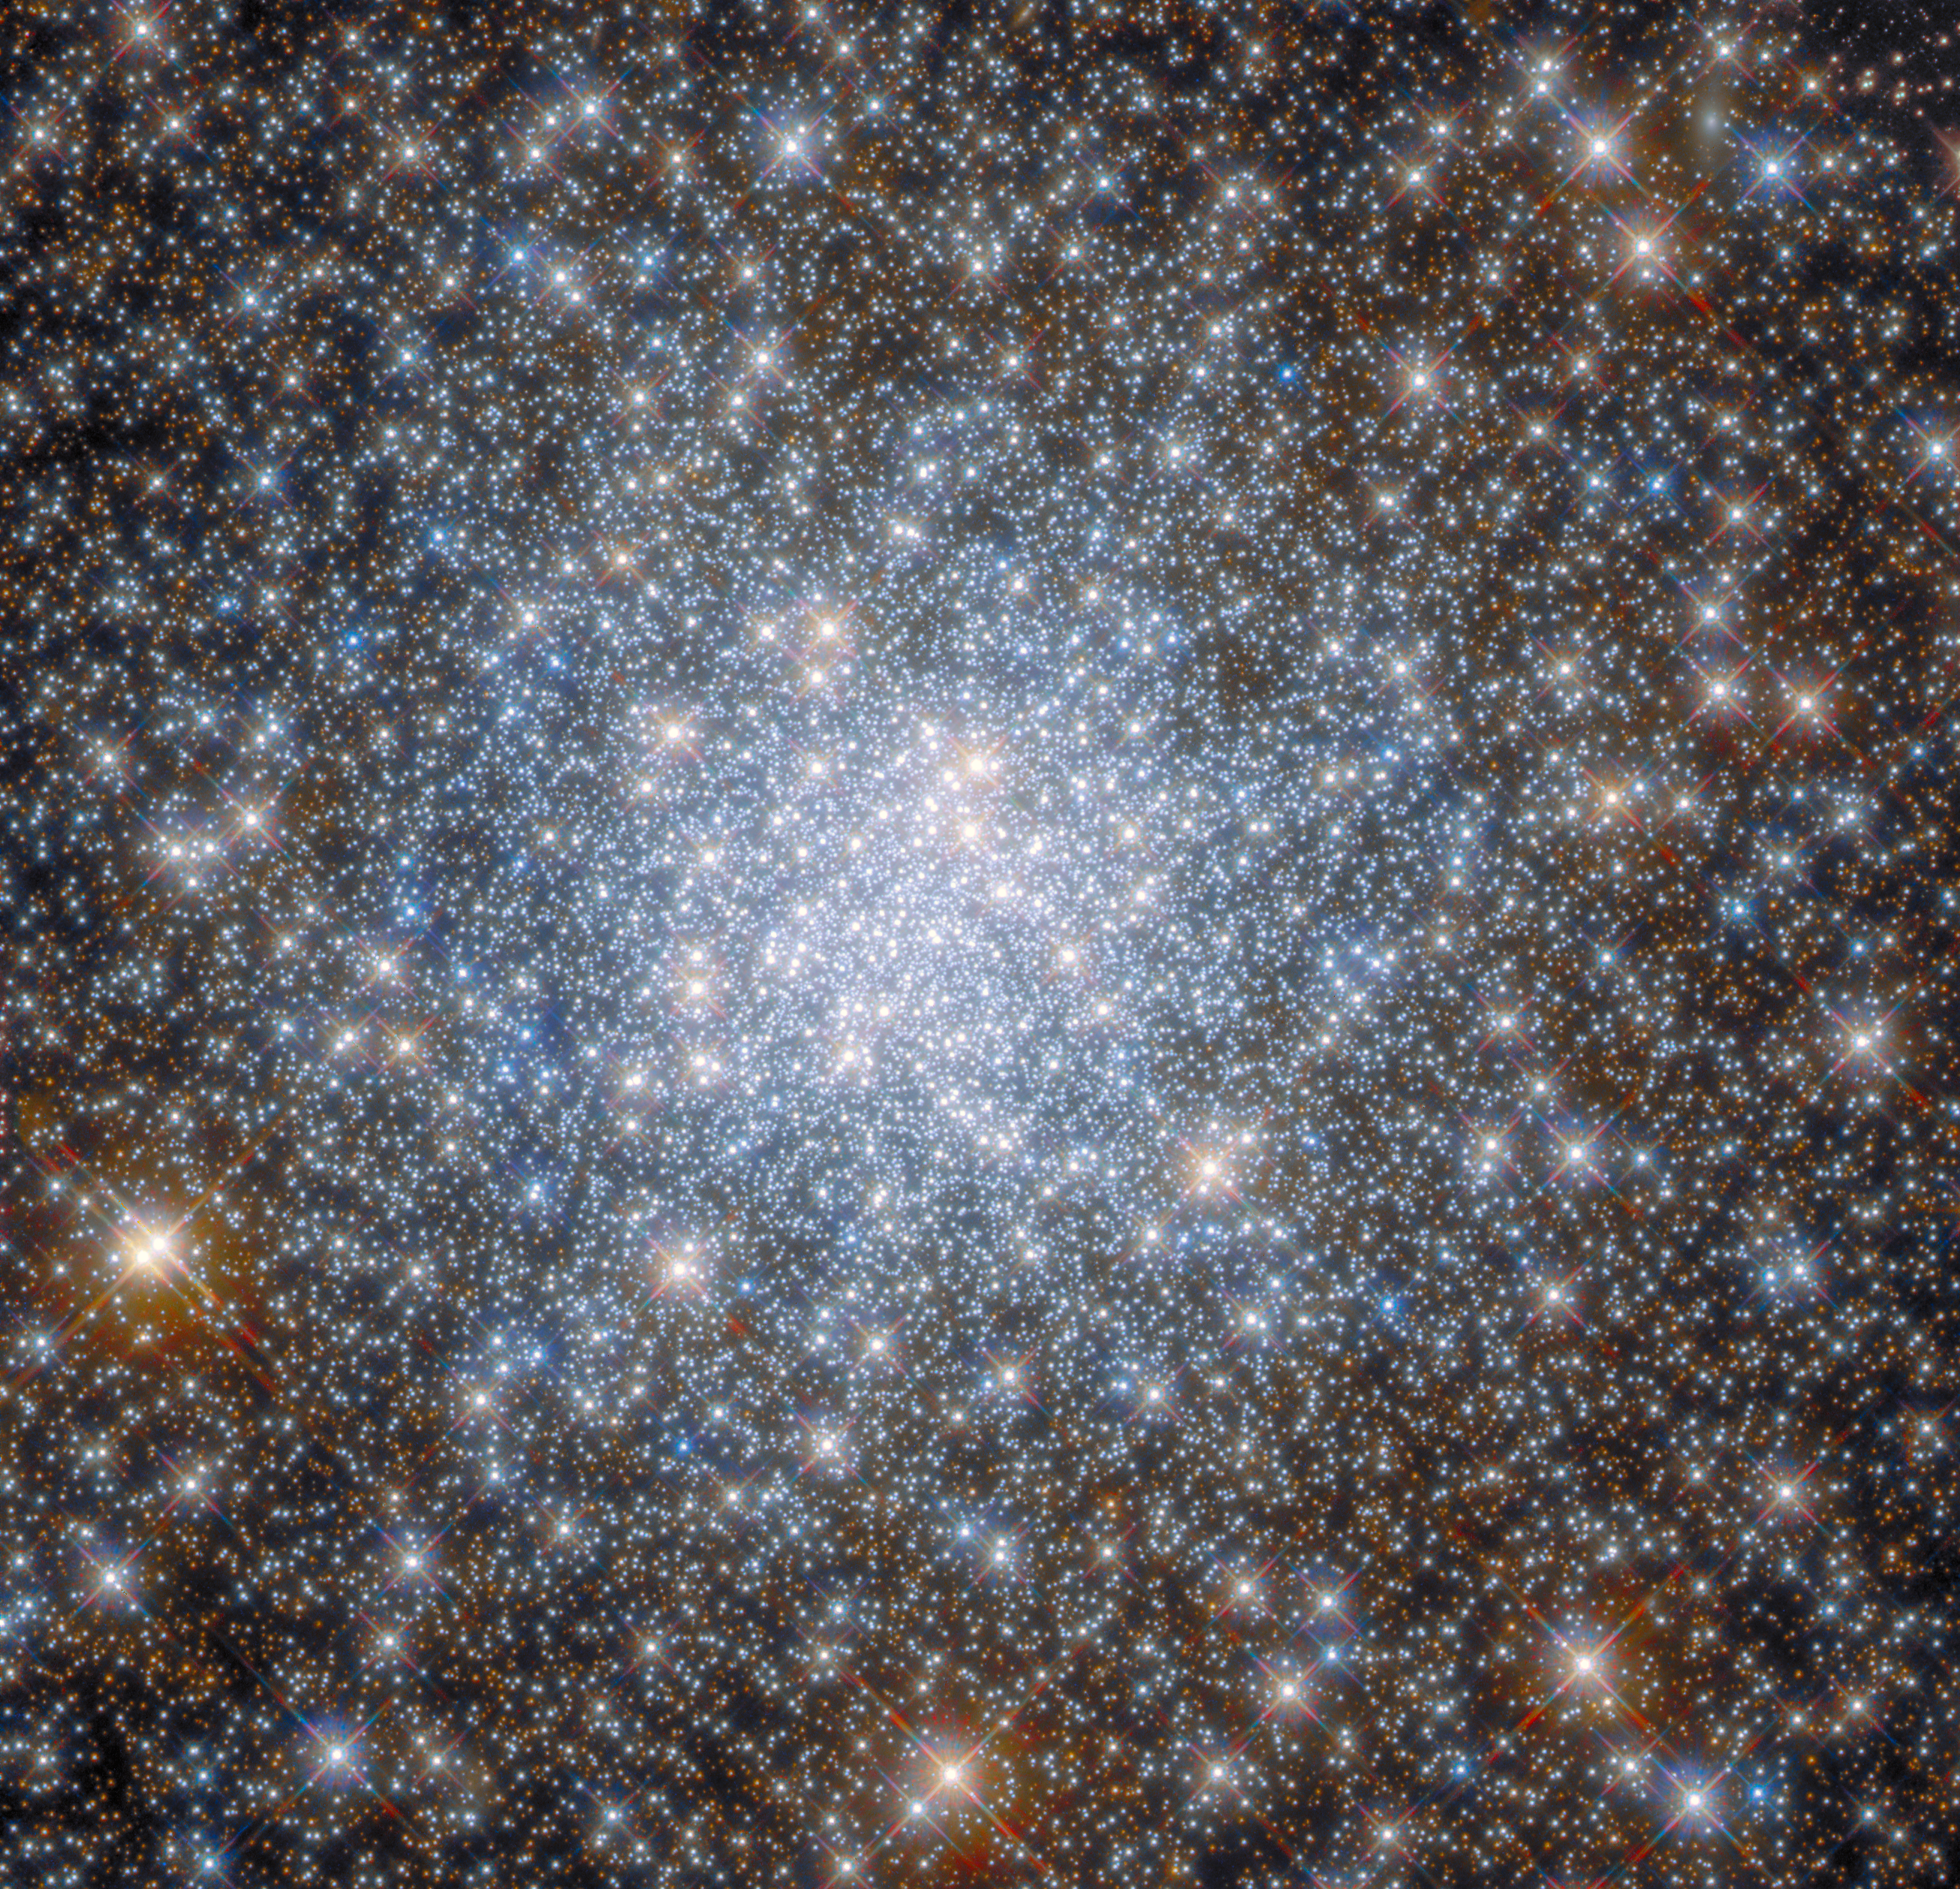

Star-Studded Skyfield

This star-studded image from the NASA/ESA Hubble Space Telescope shows the heart of the globular cluster NGC 6638 in the constellation Sagittarius. The star-strewn observation highlights the density of stars at the heart of globular clusters, which are stable, tightly bound clusters of tens of thousands to millions of stars. To capture the data in this image, Hubble used two of its cutting-edge astronomical instruments: Wide Field Camera 3 and the Advanced Camera for Surveys.

Hubble revolutionised the study of globular clusters, as it is almost impossible to clearly distinguish the stars in globular clusters with ground-based telescopes. The blurring caused by Earth’s atmosphere makes it impossible to tell one star from another, but from Hubble’s location in low Earth orbit the atmosphere no longer poses a problem. As a result, Hubble has been used to study what kind of stars globular clusters are made up of, how they evolve, and the role of gravity in these dense systems.

The NASA/ESA/CSA James Webb Space Telescope will further our understanding of globular clusters by peering into those globular clusters that are currently obscured by dust. Webb will predominantly observe at infrared wavelengths, which are less affected by the gas and dust surrounding newborn stars. This will allow astronomers to inspect star clusters that are freshly formed, providing insights into stellar populations before they have a chance to evolve.

Credit: ESA/Hubble & NASA, R. Cohen